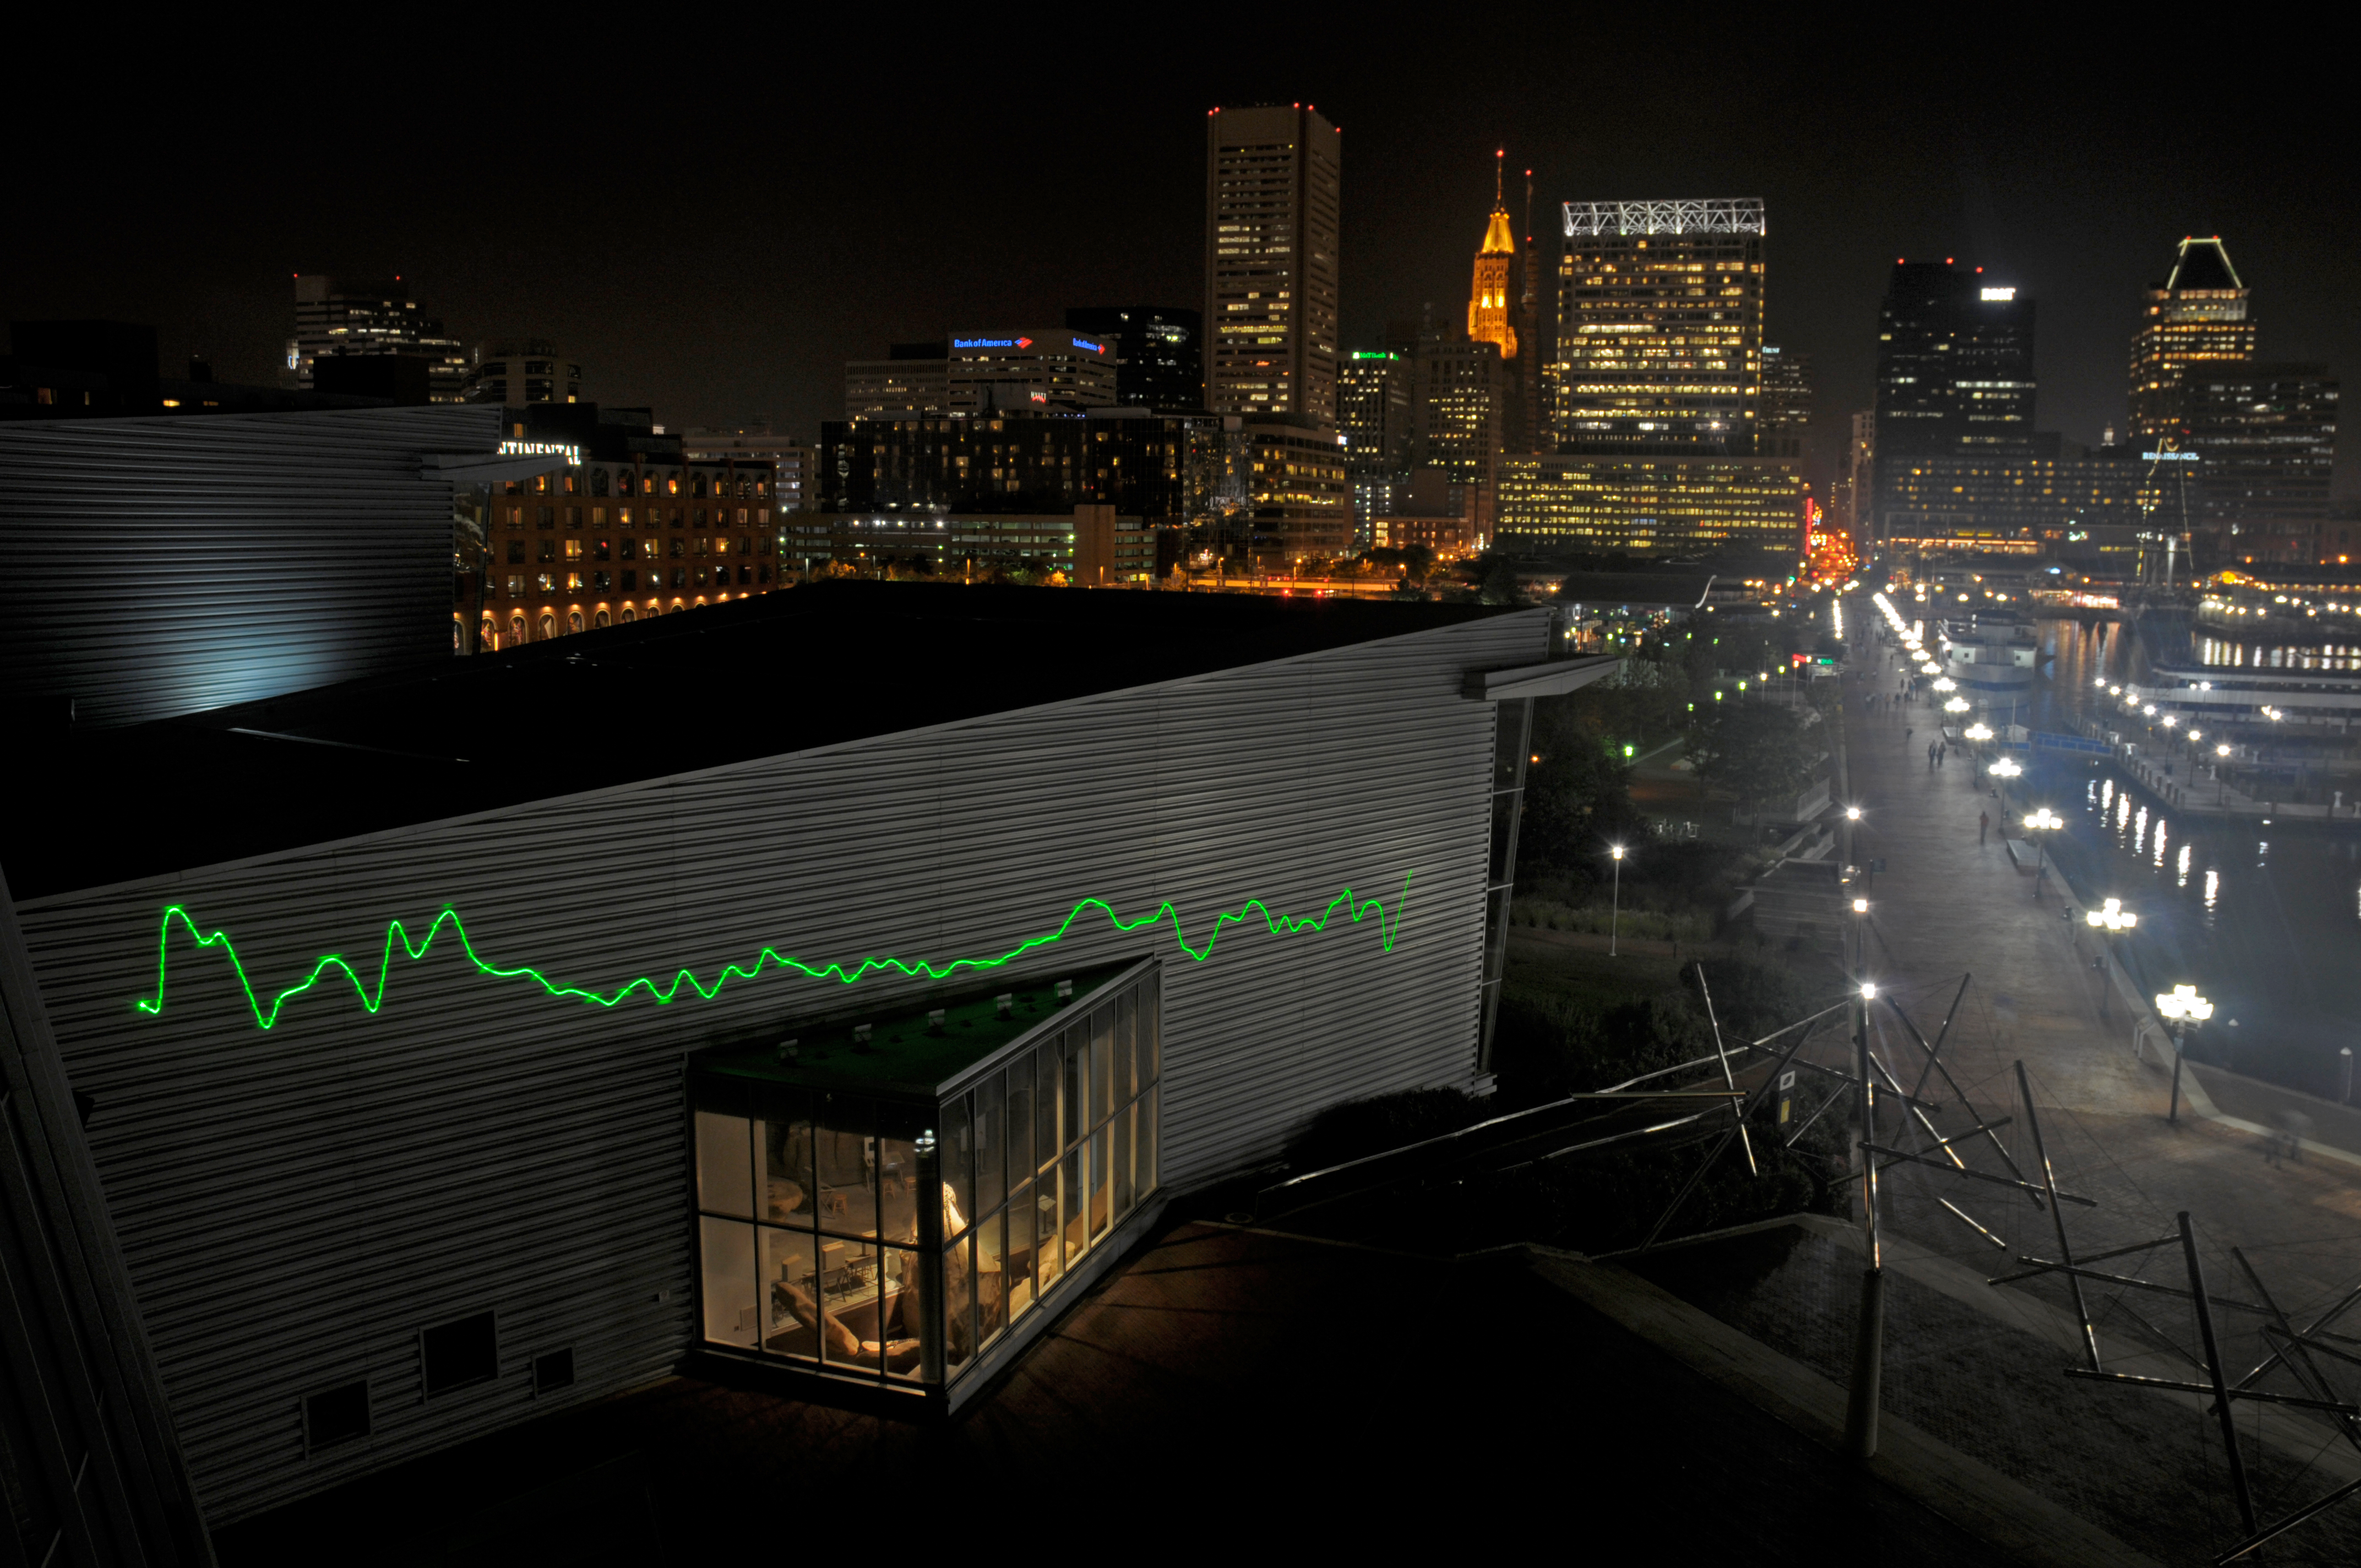

From the Distant Past

A public art installation featuring Hubble observations of distant galaxies, quasars and stars is going to the USA. From the Distant Past features a laser projecting spectra from distant celestial objects onto the facades of buildings. While the green lines might appear abstract at first, they represent light, split into its constituent colours, that has travelled across space for billions of years from some of the most distant galaxies ever observed.

The idea for the installation was generated by German concept artist Tim Otto Roth, in collaboration with astronomer Bob Fosbury, the former head of the Space Telescope European Coordinating Facility.

Credit: NASA, ESA, Mark Clampin